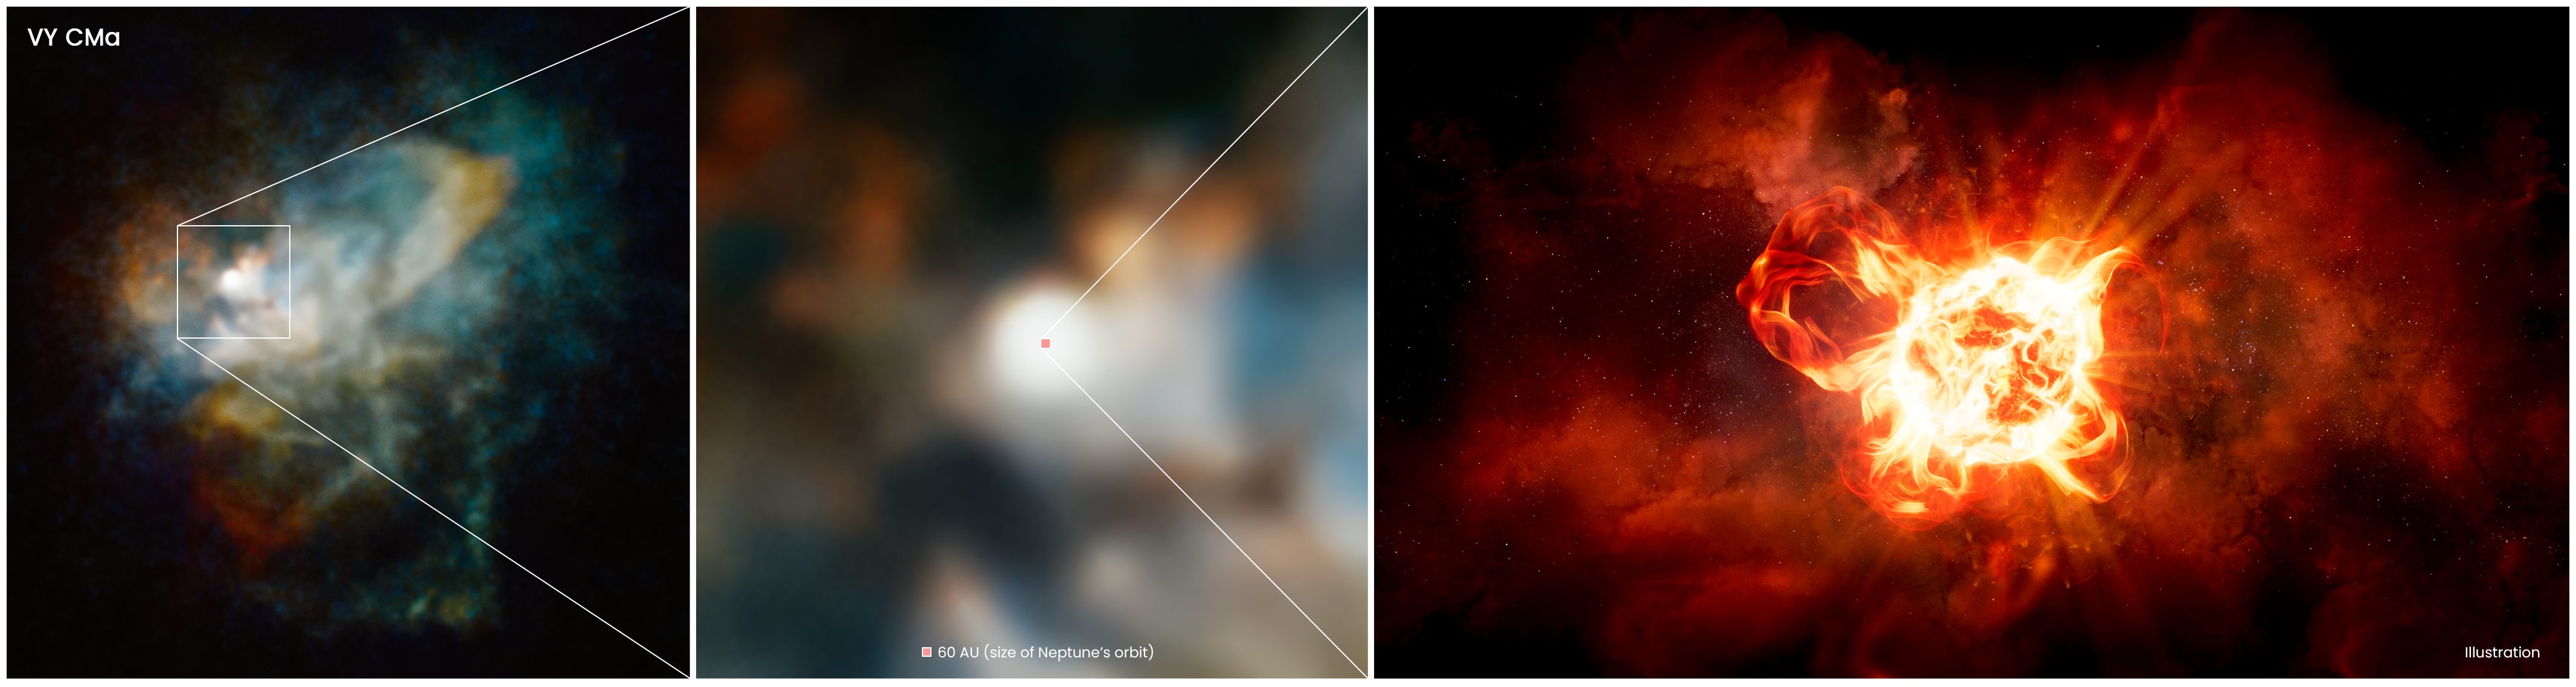

Hubble Solves Mystery of Monster Star's Dimming

If placed in the middle of our solar system, the star VY Canis Majoris would engulf all the planets out to Saturn's orbit. This monster, appropriately called a red hypergiant, is as bright as 300,000 Suns. Yet it is so far away that, 200 years ago, it could be seen only as a faint star in the winter constellation of the Great Dog. Since then, it has faded and is no longer visible to the naked eye. Astronomers used the NASA/ESA Hubble Space Telescope to get a close-up look at the star and discovered the reason for the dimming. The star is expelling huge clouds of dust in the final stages of its life. Eventually, the bloated star may explode as a supernova, or may simply collapse and form a black hole.

This zoom into VY Canis Majoris is a combination of Hubble imaging and an artist's impression. The left panel is a multicolor Hubble image of the huge nebula of material cast off by the hypergiant star. This nebula is approximately 300 billion kilometers across.

The middle panel is a close-up Hubble view of the region around the star. This image reveals close-in knots, arcs, and filaments of material ejected from the star as it goes through its violent process of casting off material into space. VY Canis Majoris is not seen in this view, but the tiny red square marks the location of the hypergiant, and represents the diameter of the solar system out to the orbit of Neptune, which is 5.5 billion miles across.

The final panel is an artist's impression of the hypergiant star with vast convection cells and undergoing violent ejections. VY Canis Majoris is so large that if it replaced the Sun, the star would extend for hundreds of millions of miles, to between the orbits of Jupiter and Saturn.

Credit: NASA, ESA, and R. Humphreys (University of Minnesota), and J. Olmsted (STScI)